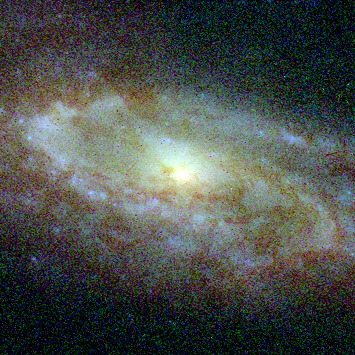

Central Bulges of Spiral Galaxies- NGC 7537 (Hubble NICMOS and WFPC2 View)

The bottom row represents composite pictures from Hubble's visible- and infrared-light cameras, the Wide Field and Planetary Camera 2(WFPC2) and the Near Infrared Camera and Multi-Object Spectrometer(NICMOS). Astronomers combined views from both cameras to obtain the true ages of the stars surrounding each galaxy's bulge. The Hubble telescope's sharper resolution allows astronomers to study the intricate structure of a galaxy's core.

Credit: NASA, ESA, and Reynier Peletier (University of Nottingham, United Kingdom)